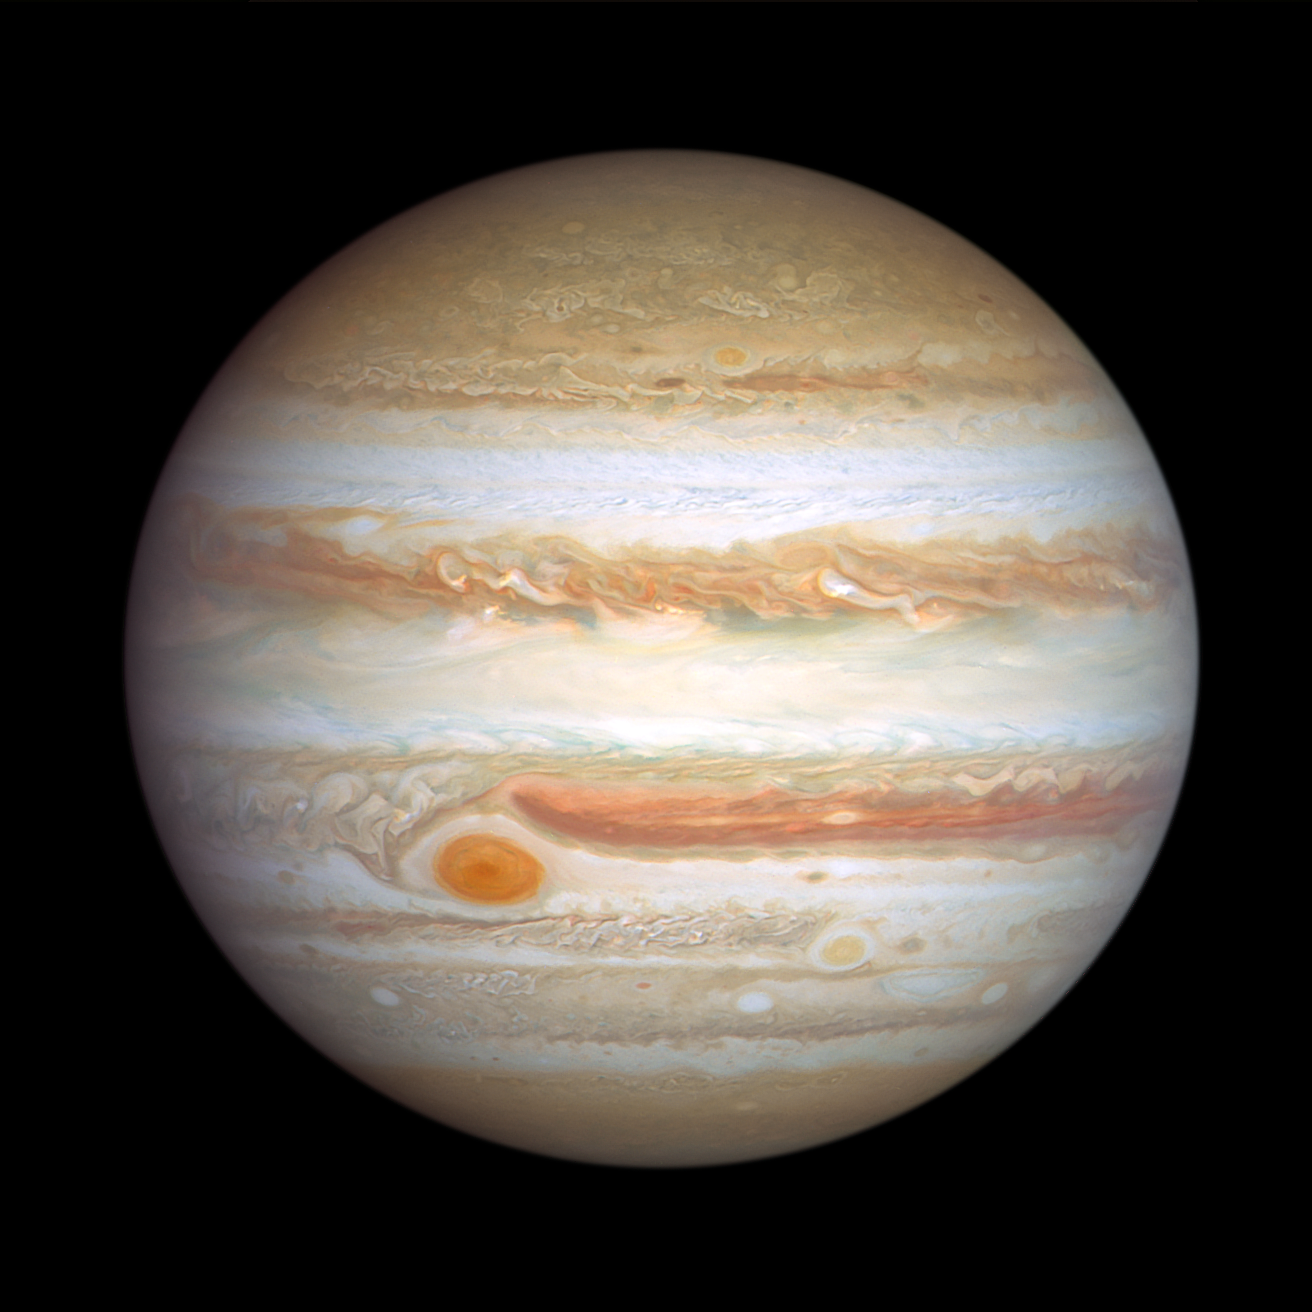

Jupiter (5 January 2024)

The giant planet Jupiter, in all its banded glory, is revisited by the NASA/ESA Hubble Space Telescope in these latest images, taken on 5 January 2024, that capture both sides of the planet. Hubble monitors Jupiter and the other outer Solar System planets every year under the Outer Planet Atmospheres Legacy programme (OPAL). This is because these large worlds are shrouded in clouds and hazes stirred up by violent winds, leading to a kaleidoscope of ever-changing weather patterns.

Big enough to swallow Earth, the classic Great Red Spot stands out prominently in Jupiter's atmosphere. To its lower right, at a more southerly latitude, is a feature sometimes dubbed Red Spot Jr. This anticyclone was the result of storms merging in 1998 and 2000, and it first appeared red in 2006 before returning to a pale beige in subsequent years. This year it is somewhat redder again. The source of the red coloration is unknown but may involve a range of chemical compounds: sulphur, phosphorus or organic material. Staying in their lanes, but moving in opposite directions, Red Spot Jr. passes the Great Red Spot about every two years. Another small red anticyclone appears in the far north.

Credit: NASA, ESA, J. DePasquale (STScI), A. Simon (NASA-GSFC)